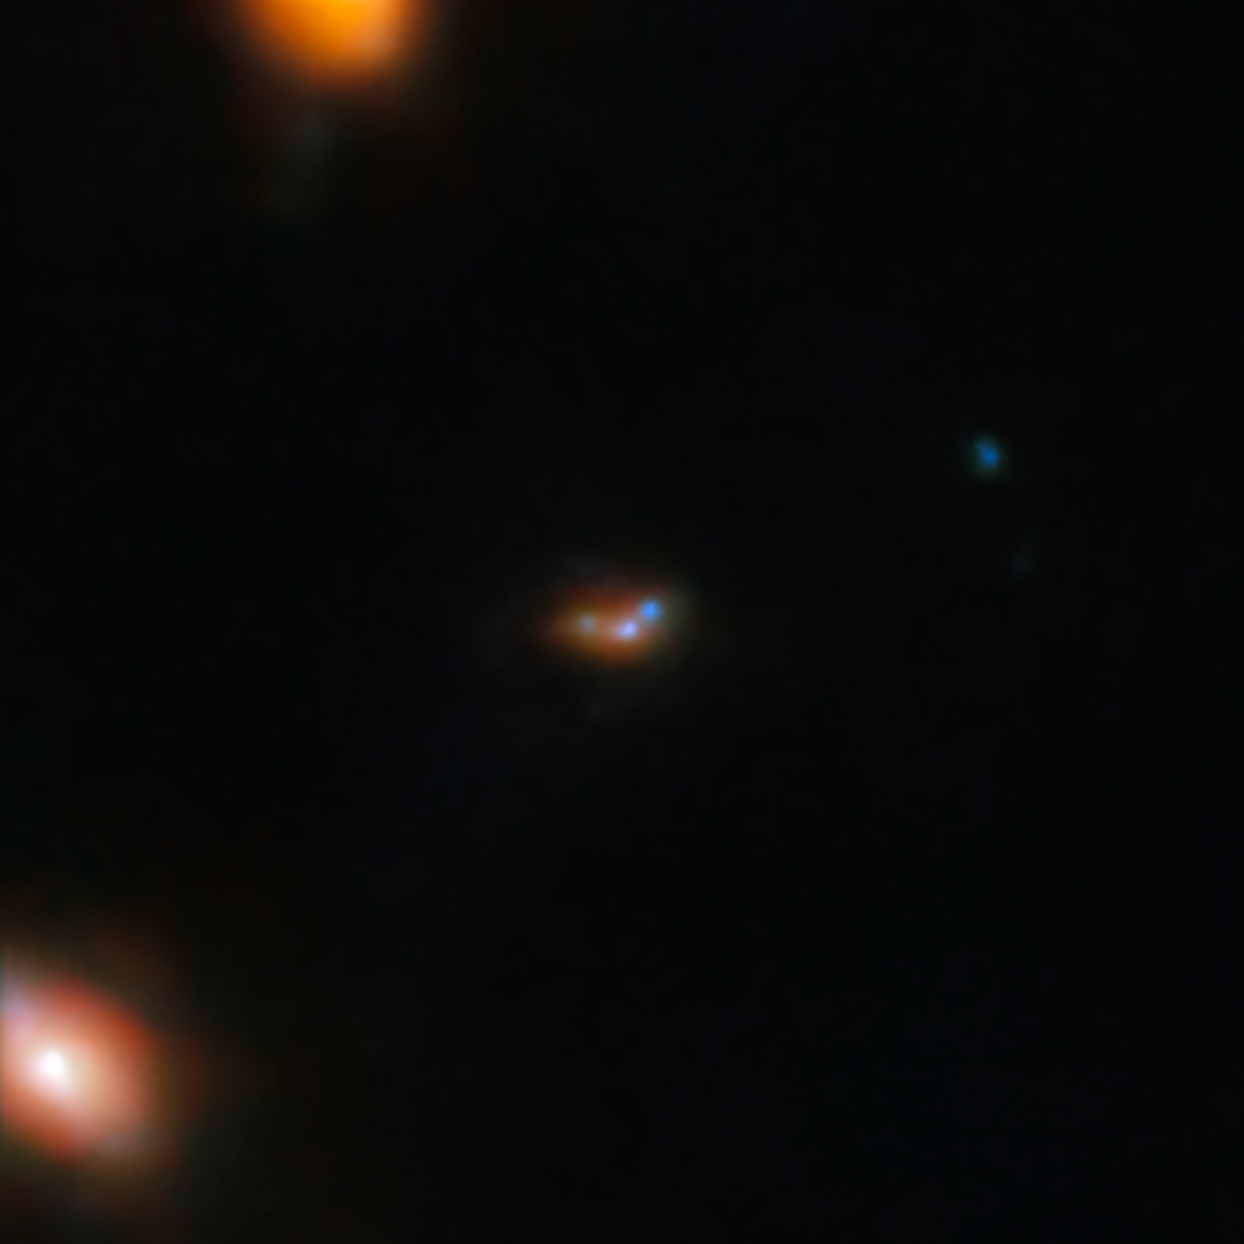

Lyman-α emitting galaxy EGSY8p7 (NIRCam image)

This image shows the galaxy EGSY8p7, a bright galaxy in the early Universe where light emission is seen from, among other things, excited hydrogen atoms — Lyman-α emission. Webb’s high sensitivity picks out this distant galaxy along with its two companion galaxies, where previous observations saw only one larger galaxy in its place.

This discovery of a cluster of interacting galaxies sheds light on the mystery of why the hydrogen emission from EGSY8p7, shrouded in neutral gas formed after the Big Bang, should be visible at all. Astronomers have concluded that the intense star-forming activity within these interacting galaxies energised hydrogen emission and cleared swathes of gas from their surroundings, allowing the unexpected hydrogen emission to escape.

This close-up view of EGSY8p7 has been newly processed, making use of NIRCam data captured with seven different near-infrared filters.

Credit: ESA/Webb, NASA & CSA, C. Witten, M. Zamani (ESA/Webb)